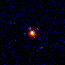

Hubble's Top Ten Gravitational Lenses. A View of HST 12531-2914

HST 12531-2914 is the second quadruple lens candidate discovered with Hubble. It is similar to the first, but appears smaller and fainter.

Credit: Kavan Ratnatunga (Carnegie Mellon Univ.) and NASA/ESA